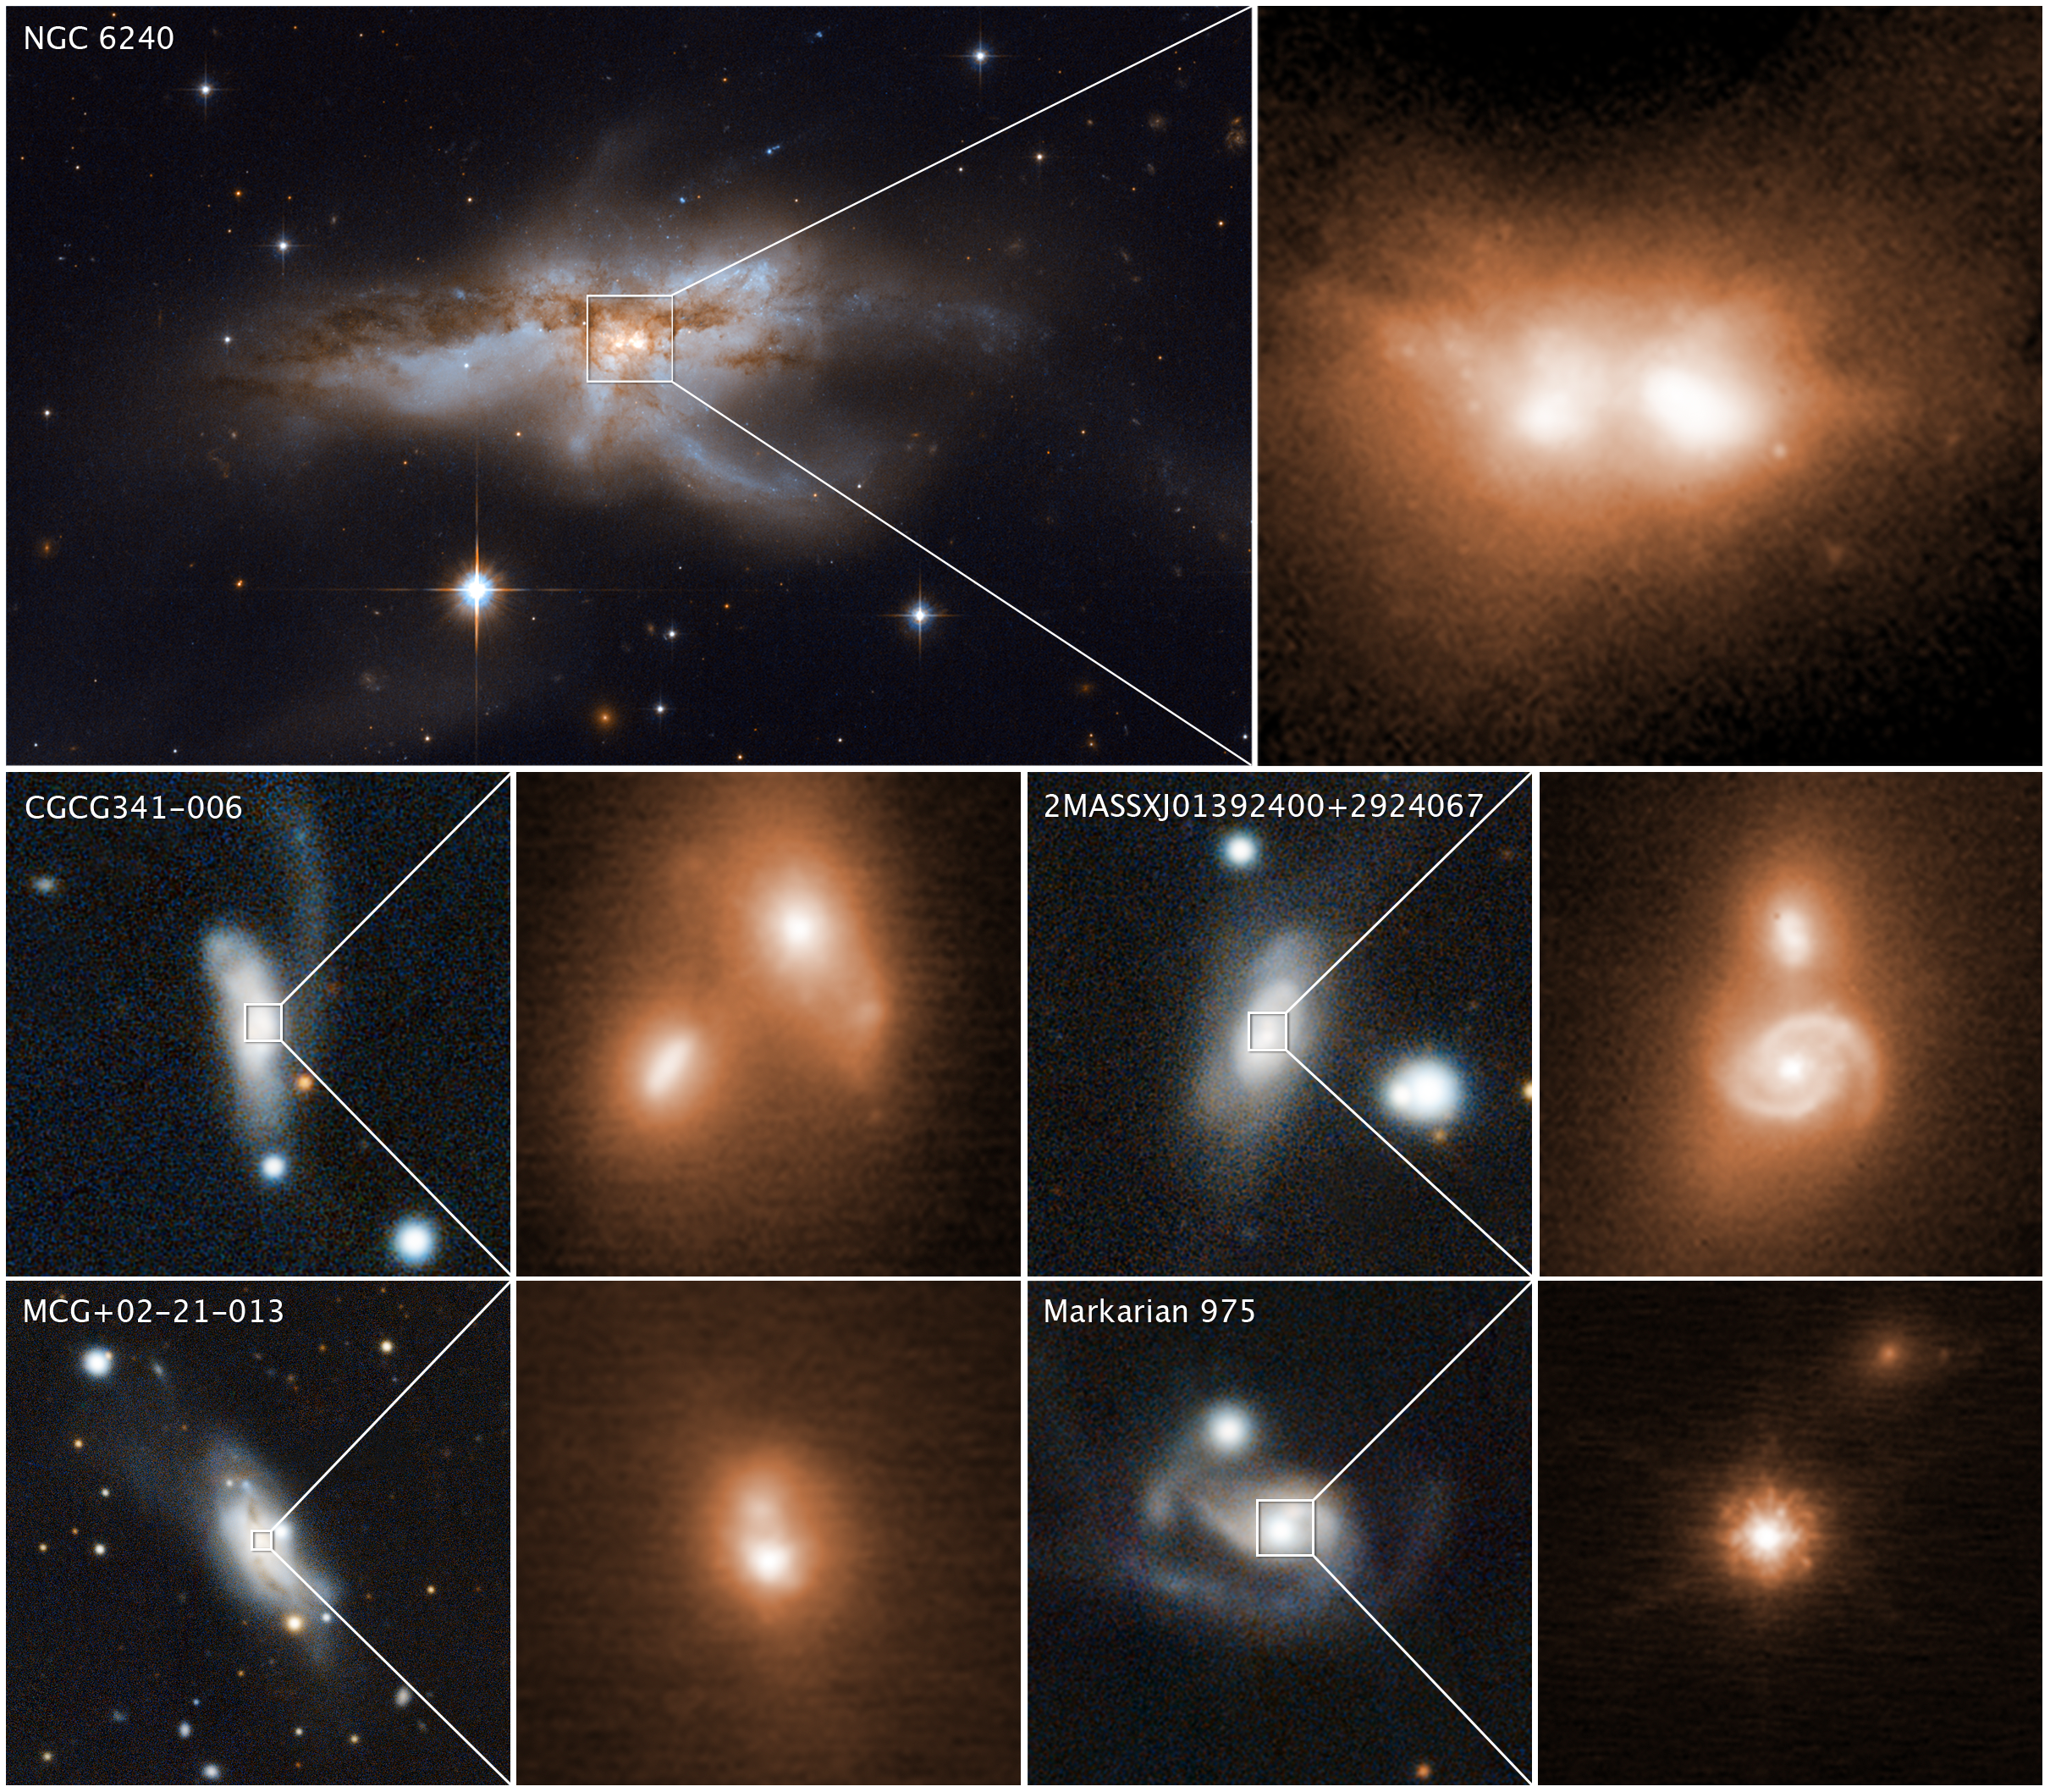

Hubble and Keck observatories uncover black holes coalescing

These images reveal the final stage of a union between pairs of galactic nuclei in the messy cores of colliding galaxies.

The image at top left, taken by the Wide Field Camera 3 on the NASA/ESA Hubble Space Telescope, shows the merging galaxy NGC 6240. A close-up of the two brilliant cores of this galactic union is shown at top right. This view, taken in infrared light, pierces the dense cloud of dust and gas encasing the two colliding galaxies and uncovers the active cores. The hefty black holes in these cores are growing quickly as they feast on gas kicked up by the galaxy merger. The black holes' speedy growth occurs during the last 10 million to 20 million years of the merger.

Images of four other colliding galaxies, along with close-up views of their coalescing nuclei in the bright cores, are shown beneath the snapshots of NGC 6240. The images of the bright cores were taken in near-infrared light by the W. M. Keck Observatory in Hawaii, using adaptive optics to sharpen the view.

The reference images (left) of the merging galaxies were taken by the Panoramic Survey Telescope and Rapid Response System (Pan-STARRS).

The two nuclei in the Hubble and Keck Observatory photos are only about 3000 light-years apart — a near-embrace in cosmic terms. If there are pairs of black holes, they will likely merge within the next 10 million years to form a more massive black hole.

These observations are part of the largest-ever survey of the cores of nearby galaxies using high-resolution images in near-infrared light taken by the Hubble and Keck observatories.

The survey galaxies' average distance is 330 million light-years from Earth.

Credit: NASA, ESA, and M. Koss (Eureka Scientific, Inc.); Hubble image: NASA, ESA, and M. Koss (Eureka Scientific, Inc.); Keck images: W. M. Keck Observatory and M. Koss (Eureka Scientific, Inc.); Pan-STARRS images: Panoramic Survey Telescope and Rapid Response System and M. Koss (Eureka Scientific, Inc.)